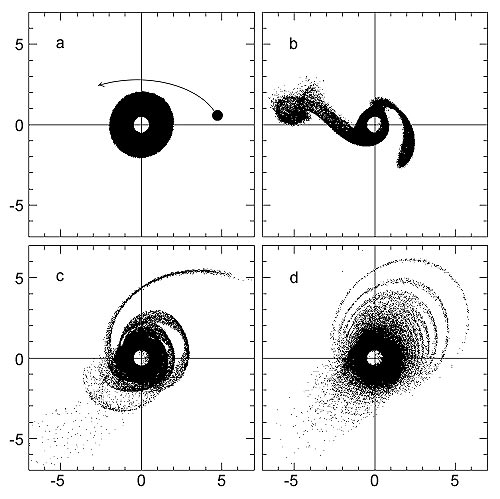

The disruption of Beta Pictoris' disk

These four images are from a computer simulation of a star flying by and disrupting a circumstellar disk of dust around the star Beta Pictoris. Frame (a) shows the encounter setup, where a small M-class star swings within 700 astronomical units (1 AU is the distance between Earth and the Sun) of Beta Pictoris, an A-class star. The circumstellar disk, seen as a black donut in this overhead view, has a 500 AU radius. In (b) the gravitational tug of the intruder star pulls the dust disk into two tidal tails stretching far beyond the disk's initial radius. Like spaghetti wrapped around a fork, the tidal tails are tangled together in (c). This leads to the formation of concentric ringlets of dust (d) on one side of the star. The entire sequence takes 100, 000 years. This simulation explains observed asymmetries, knots, and other unique features of the Beta Pictoris disk.

Credit: John Larwood (Queen Mary and Westfield College, London, UK)